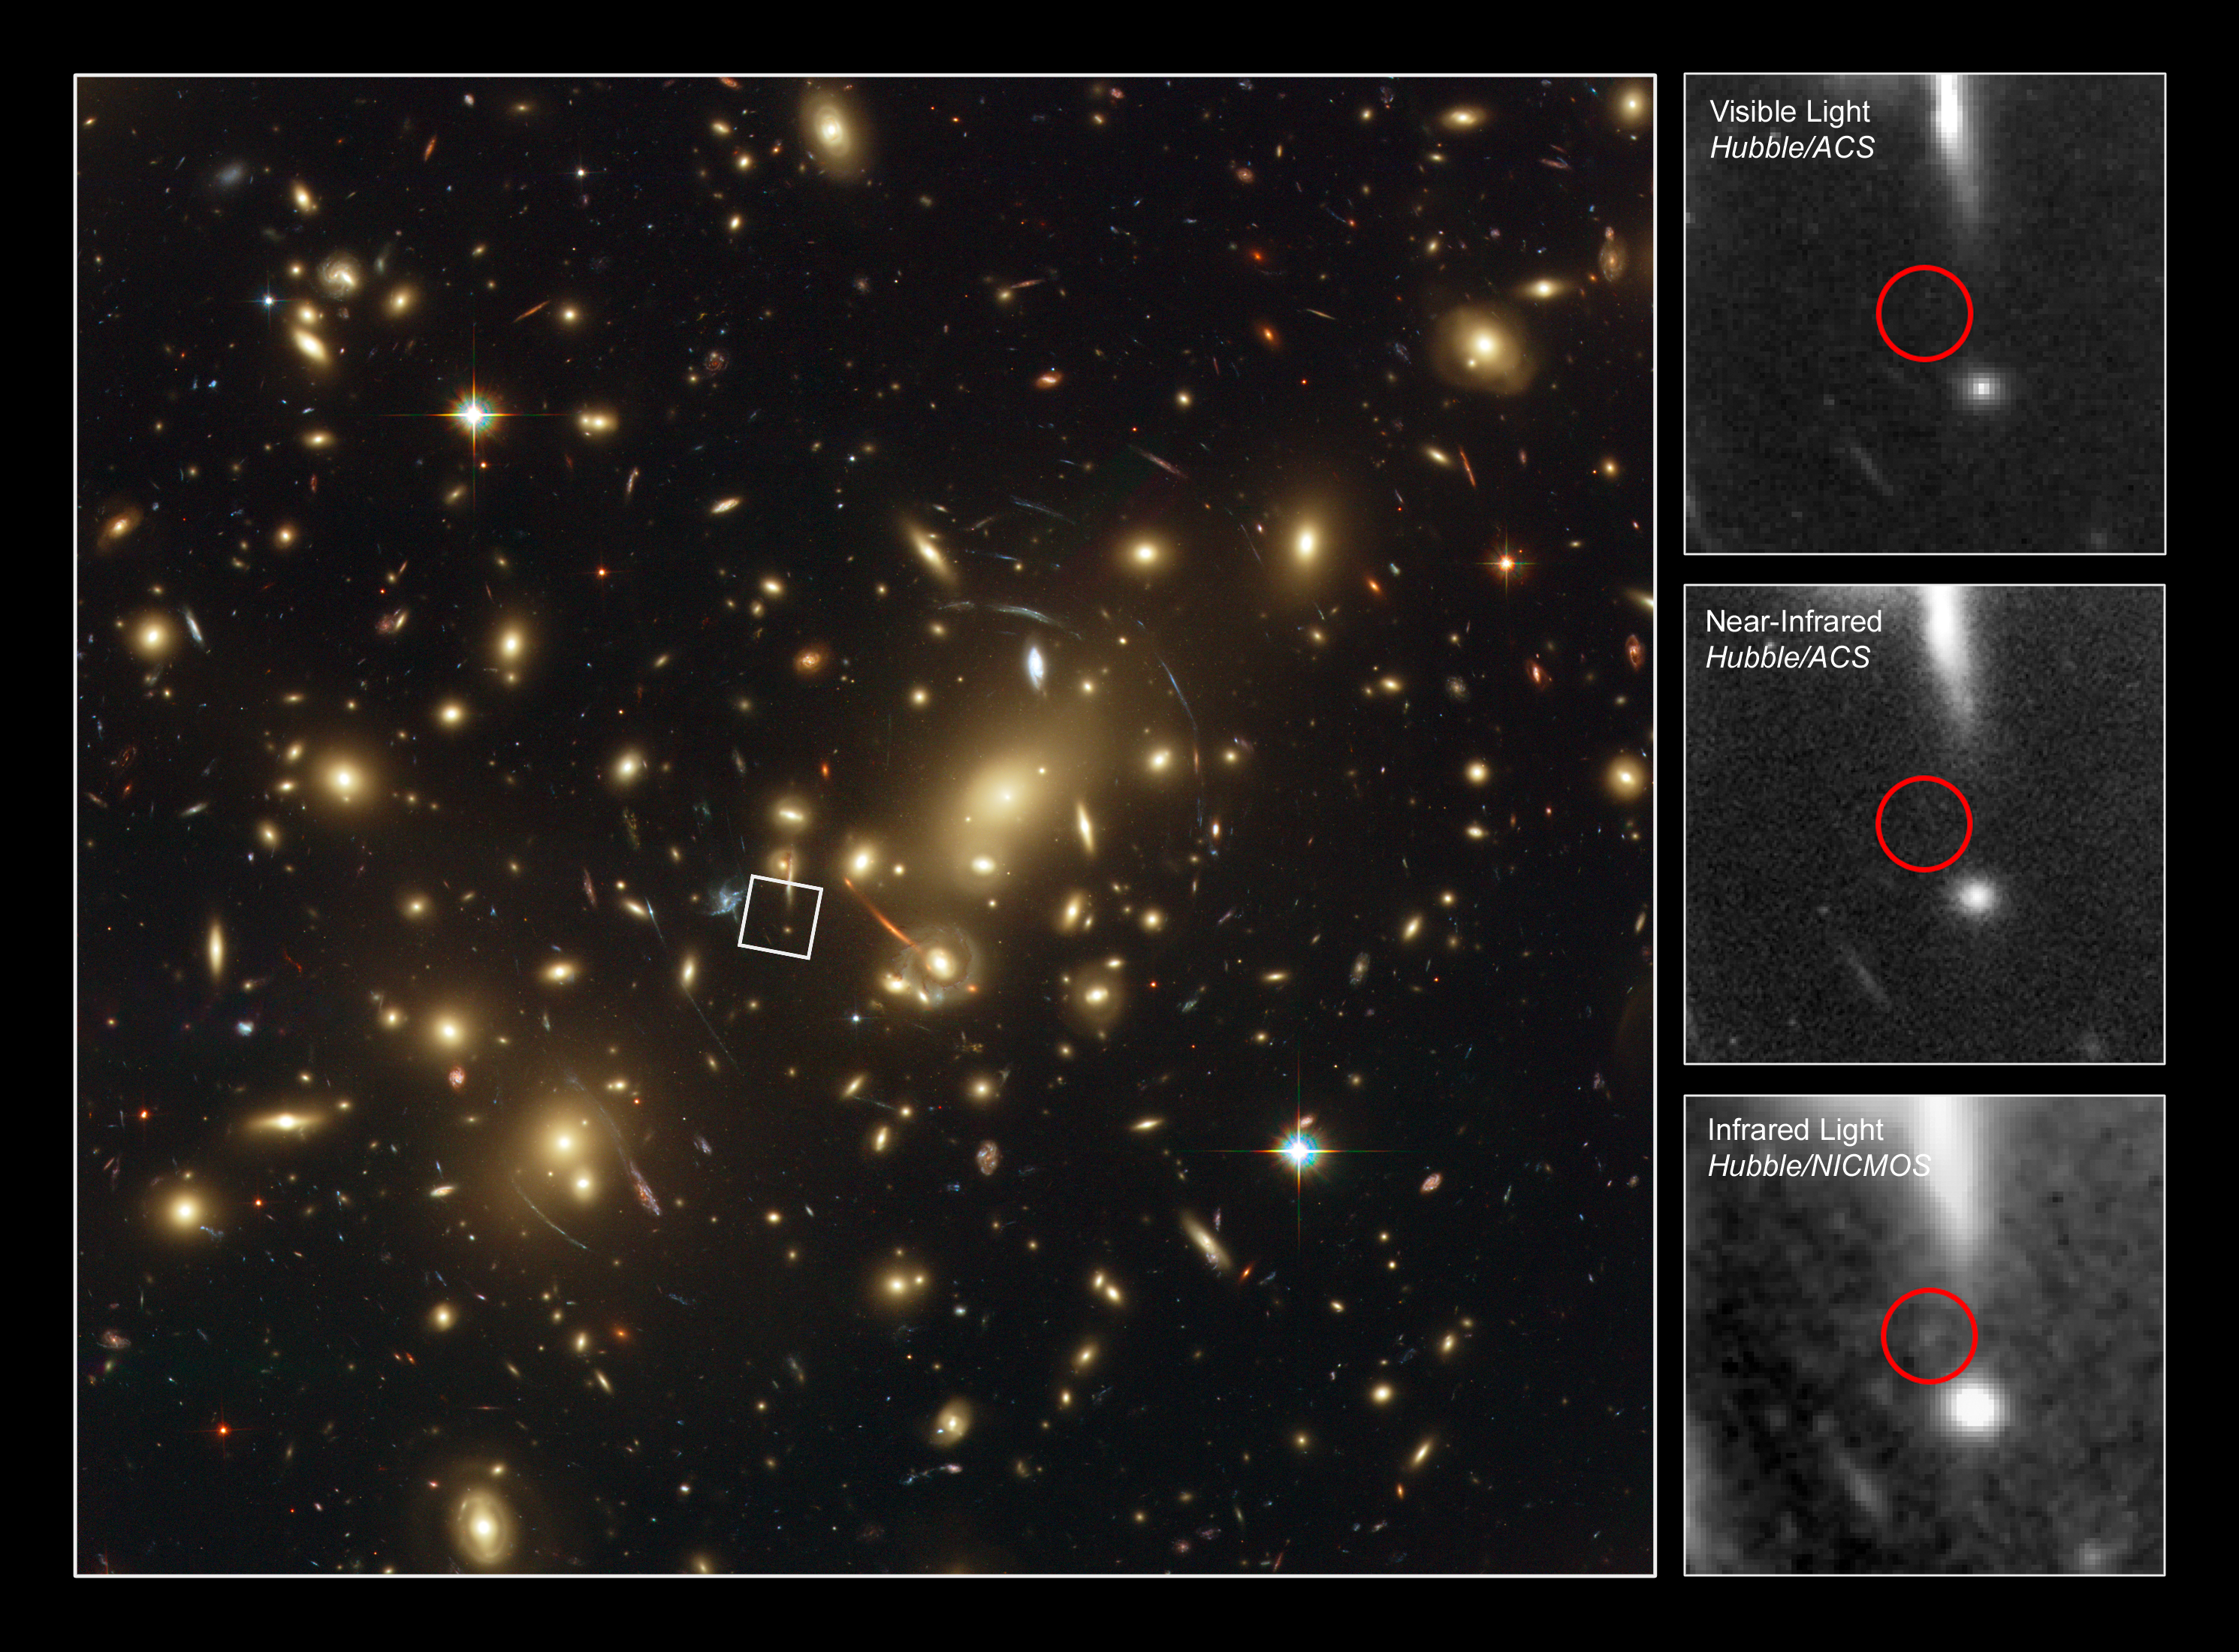

Abell 2218_z1 in detail

The central picture shows Abell 2218, a rich galaxy cluster composed of thousands of individual galaxies. It sits about 2.1 billion light-years from the Earth (redshift 0.17) in the northern constellation of Draco. When used by astronomers as a powerful gravitational lens to magnify distant galaxies, the cluster allows them to peer far into the Universe. However, it not only magnifies the images of hidden galaxies, but also distorts them into long, thin arcs.

Several arcs in the image can be studied in detail thanks to Hubble's sharp vision. Multiple distorted images of the same galaxies can be identified by comparing the shape of the galaxies and their colour. In addition to the giant arcs, many smaller arclets have been identified.

The pictures along the right edge show one of the galaxies viewed at approximately redshift 7.5 with the help of the gravitational lens. The galaxy cannot be seen in the top image, which was taken in the visual range by ACS. In the middle image, taken in the near-infrared by ACS, the galaxy becomes barely visible in the circled region. The galaxy finally becomes fully visible in the bottom image, which is taken by NICMOS in the infrared.

The galaxy is visible in the near-infrared region of the electromagnetic spectrum rather than the visible part because during the 13 billion years the light spent travelling to Earth, the Universe has expanded enough to broaden the wavelength from the visible into the near-infrared.

Credit: NASA, ESA, and Johan Richard (Caltech, USA) Acknowledgement: Davide de Martin & James Long (ESA/Hubble)